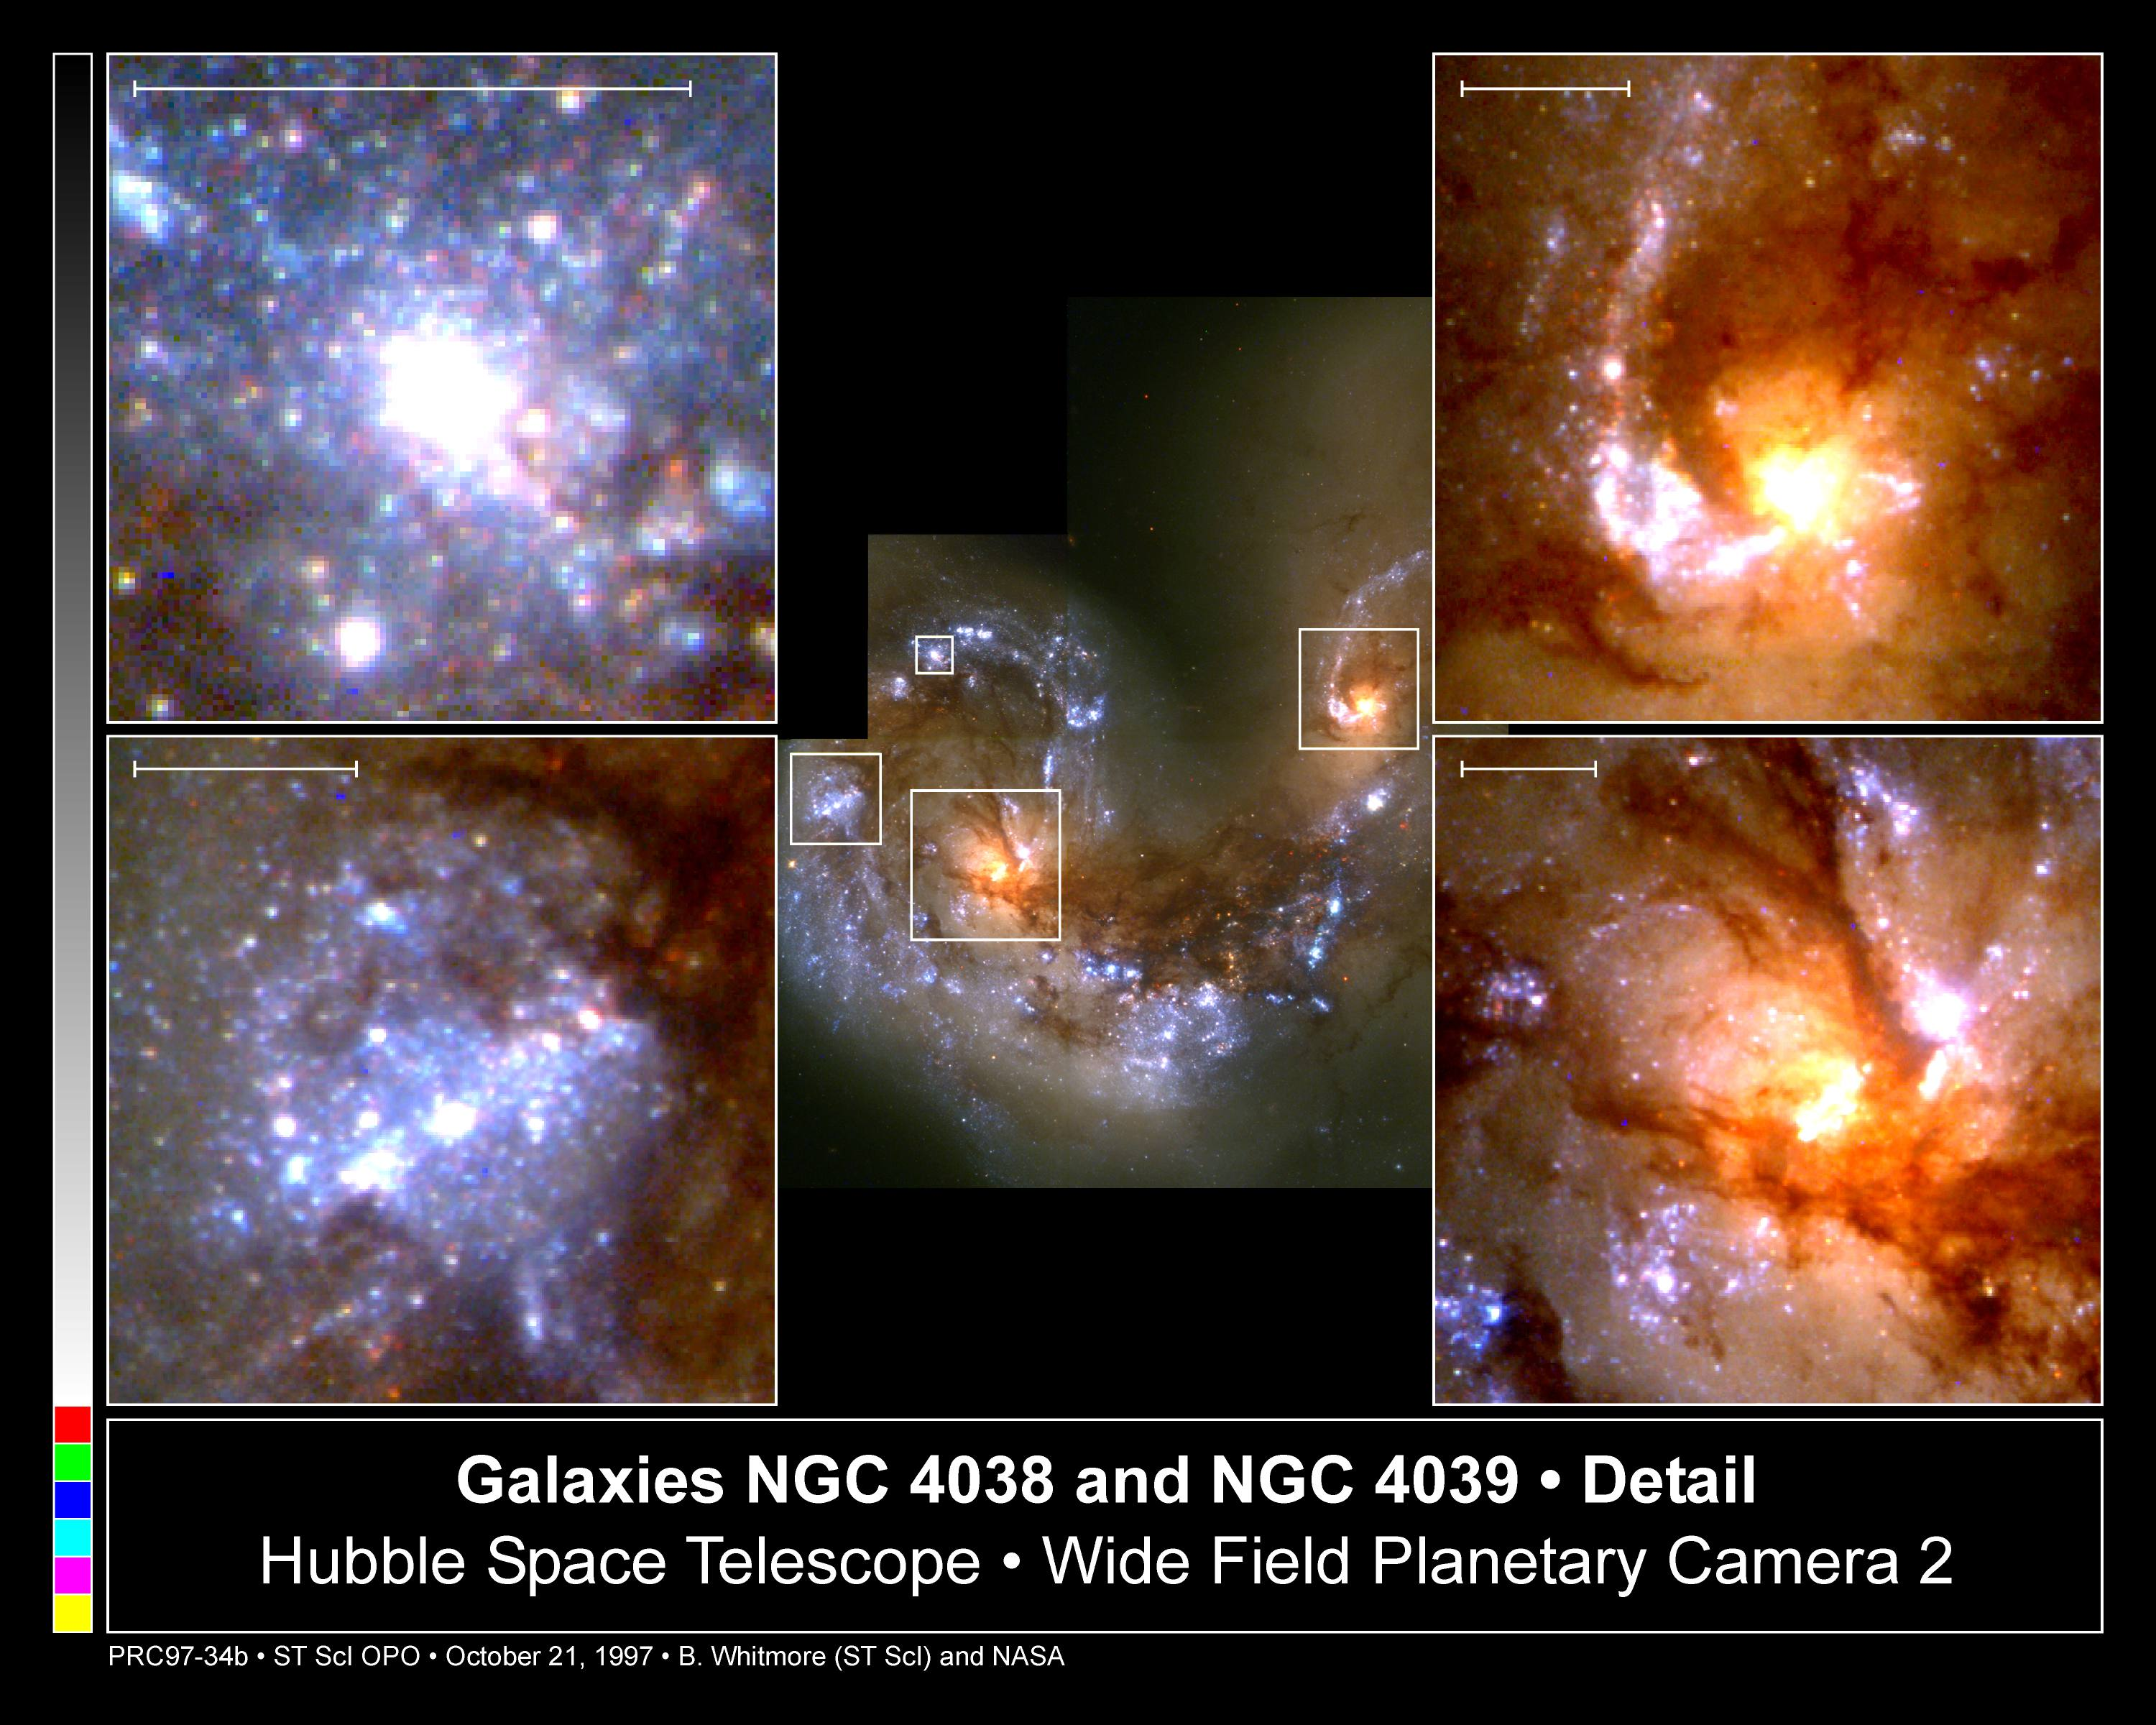

Close-Up of Star Formation in Antennae Galaxy

These four close-up views are taken from a head-on collision between two spiral galaxies, called the Antennae galaxies, seen at image center. The scale bar at the top of each image is 1, 500 light-years across.

Credit: Brad Whitmore (STScI), and NASA/ESA